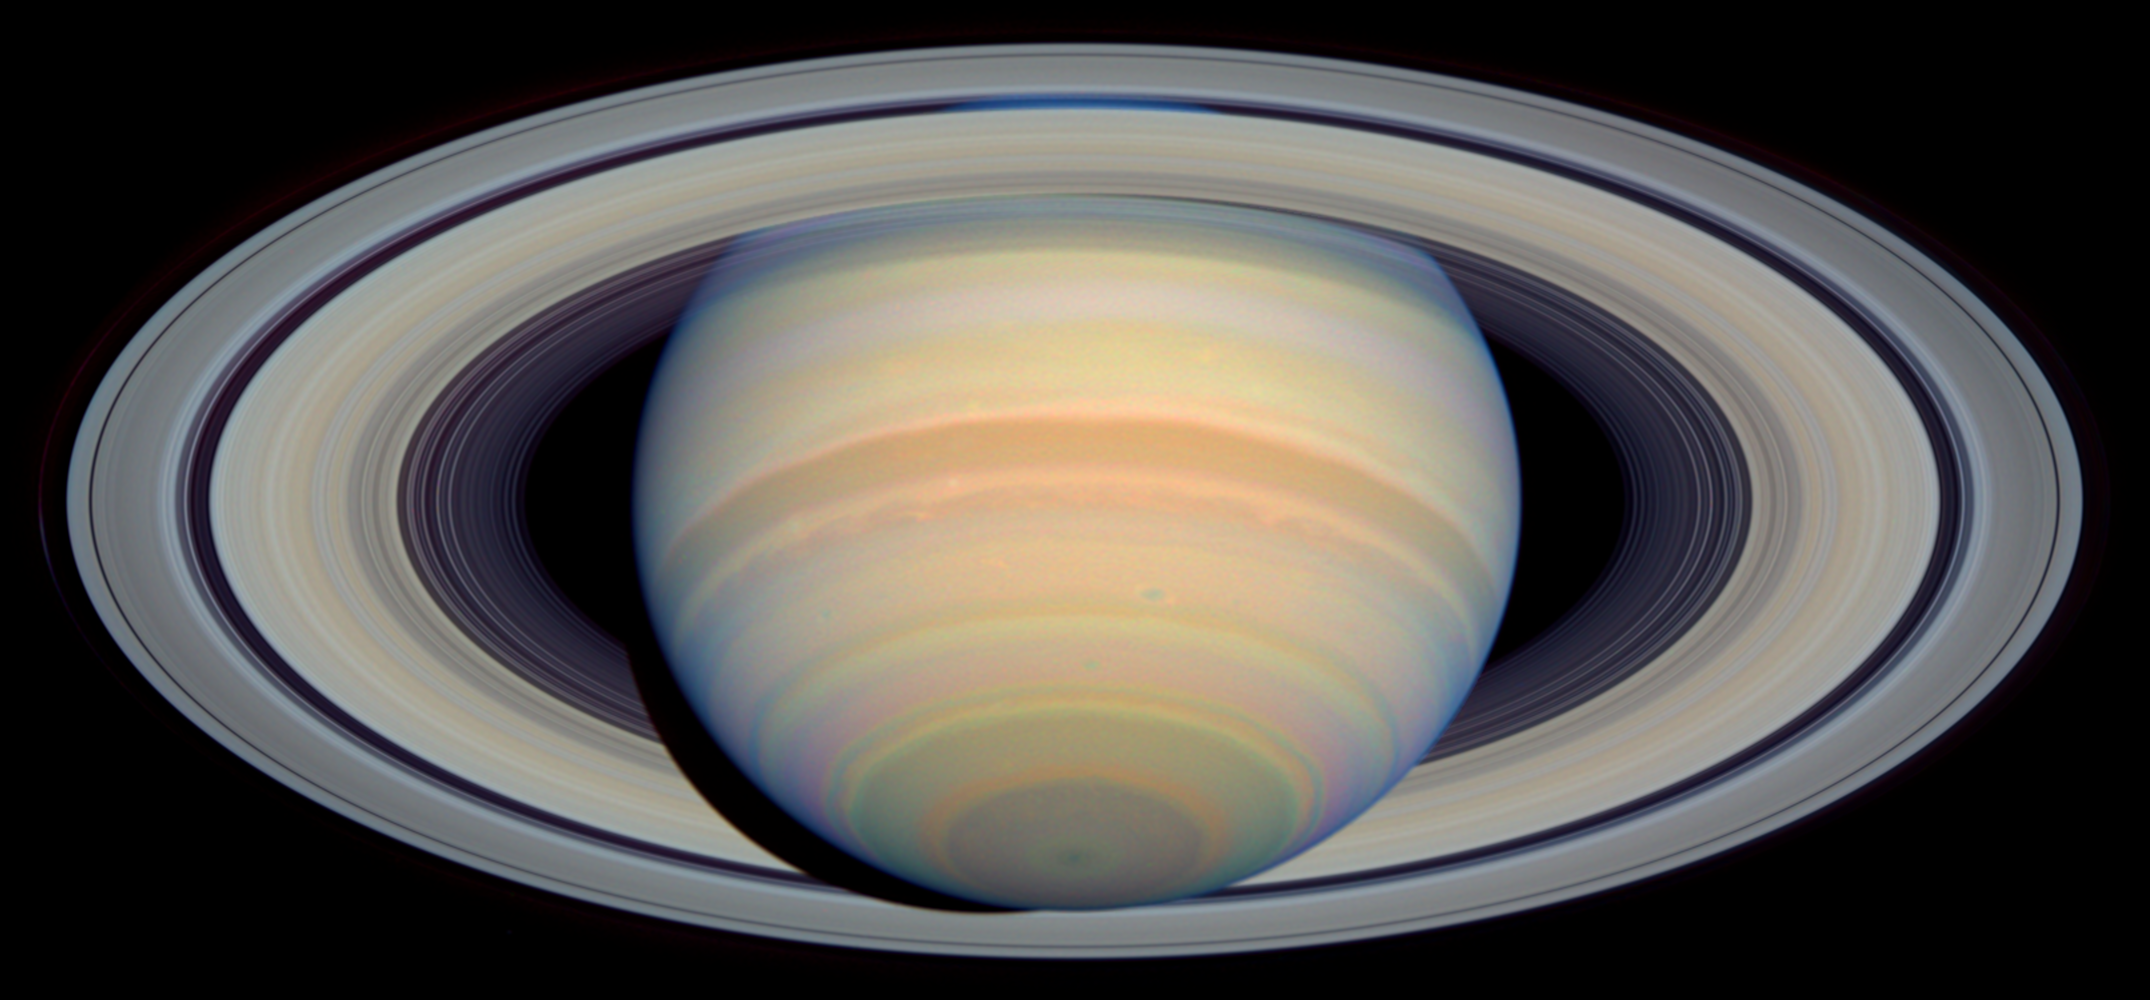

The Slant on Saturn's Rings (Visible)

This image from NASA's Hubble Space Telescope shows Saturn's Southern Hemisphere and the southern face of its rings in visible light.

Saturn experiences seasonal tilts away from and toward the Sun, much the same way Earth does, over the course of its 29.5-year orbit. This means that approximately every 30 years, we can catch Saturn with its rings at their maximum tilt of 27 degrees toward Earth and get the best glimpse of Saturn's South Pole and the southern side of the planet's rings.

Credit: NASA/ESA and E. Karkoschka (University of Arizona)